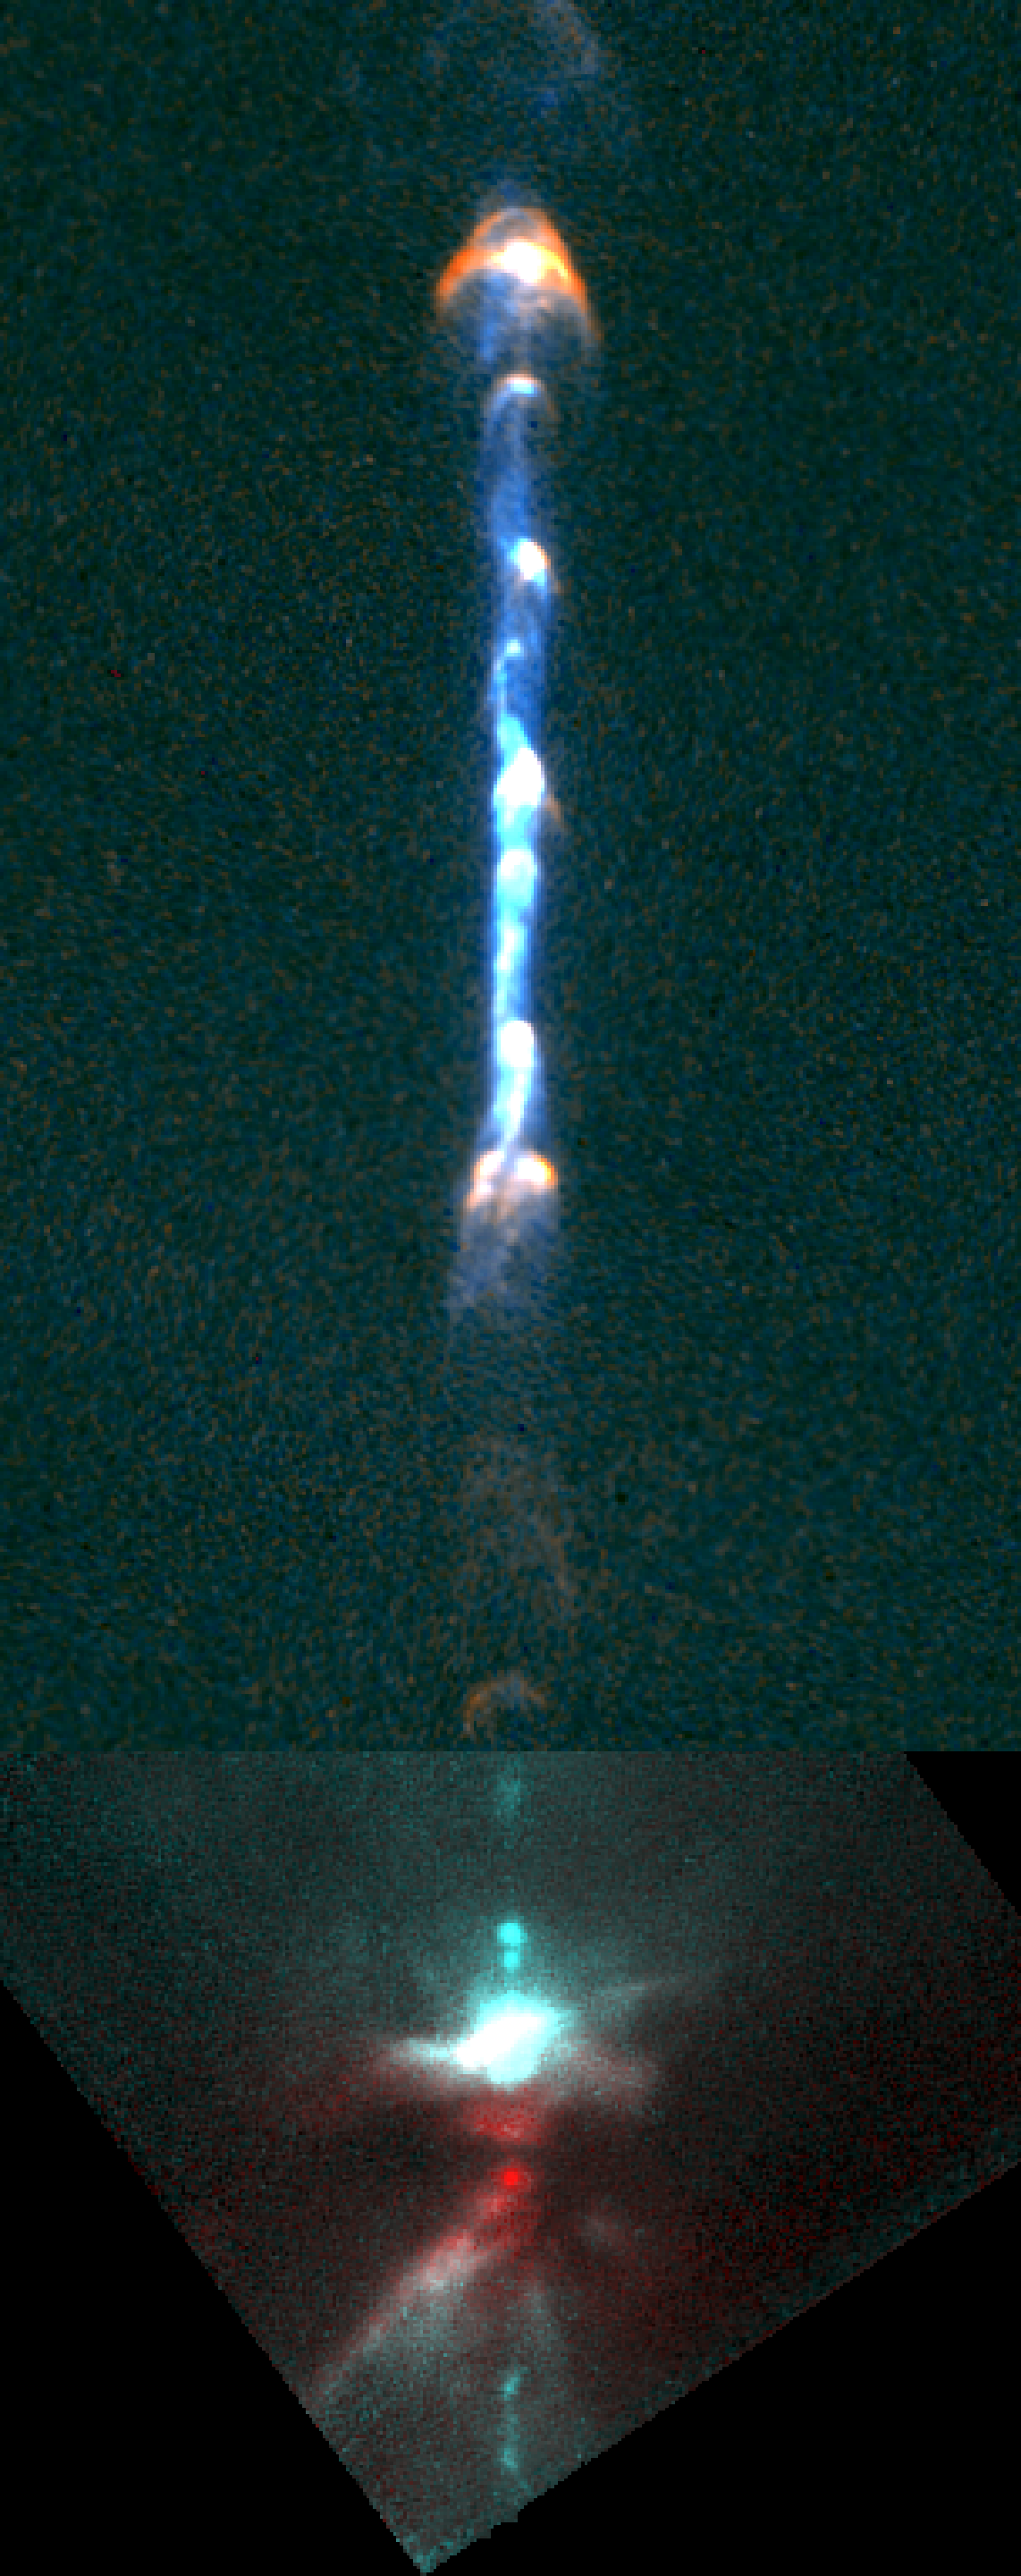

Hubble Finds Young Stars in Cosmic Dance

This composite image, made with two cameras aboard NASA/ESA Hubble Space Telescope, shows a pair of 12 light-year-long jets of gas blasted into space from a young system of three stars. The jet is seen in visible light, and its dusty disk and stars are seen in infrared light. These stars are located near a huge torus, or donut, of gas and dust from which they formed. This torus is tilted edge-on and can be seen as a dark bar near the bottom of the picture.

Credit: NASA/ESA and B. Reipurth (CASA, Univ. of Colorado)